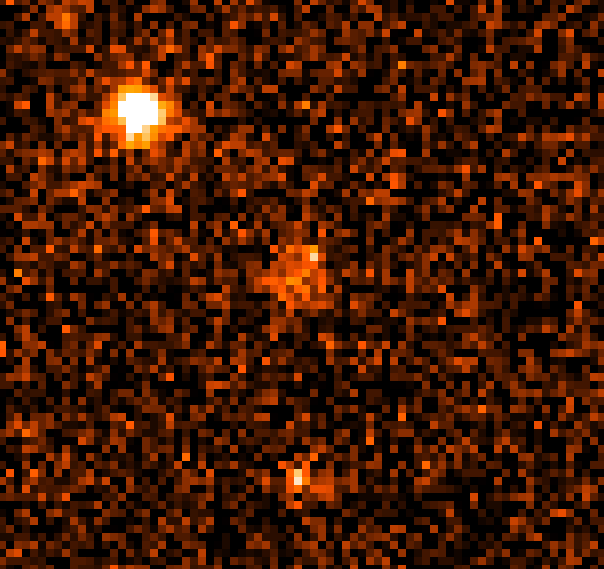

Gamma Ray Burst 970228

Though the visible component has faded to 1/500th its brightness (27.7 magnitude) from the time it was first discovered by ground- based telescopes last March (the actual gamma-ray burst took place on February 28), Hubble continues to clearly see the fireball and discriminated a surrounding nebulosity (at 25th magnitude) which is considered a host galaxy.

Credit: Andrew Fruchter (STScI), Elena Pian (ITSRE-CNR), and NASA/ESA